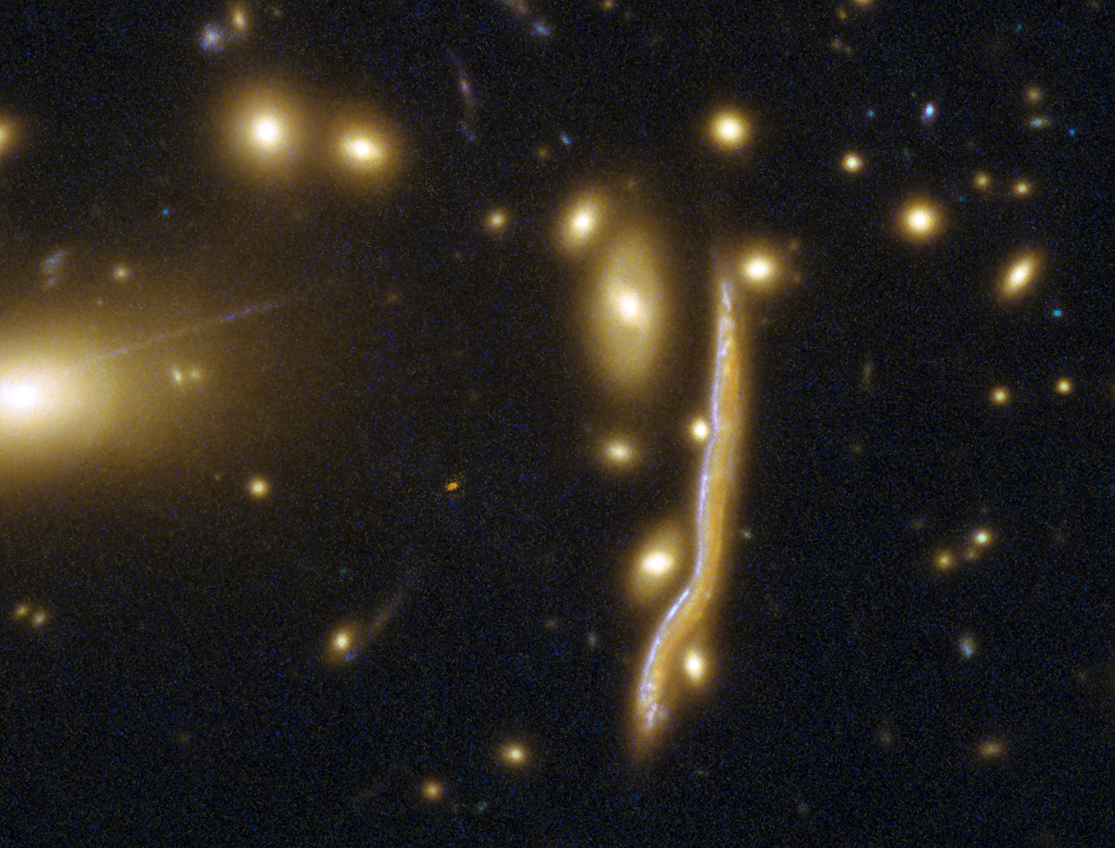

Cosmic snake pregnant with stars

This NASA/ESA Hubble Space Telescope image reveals the Cosmic Snake, a distant galaxy peppered with clumpy regions of intense star formation that appear warped by the effect of gravitational lensing. This giant arc-like galaxy is actually behind the huge galaxy cluster MACSJ1206.2-0847, but thanks to the cluster’s gravity, we can see it from Earth.

Light from the distant, high-redshift galaxy arrives at Earth, having been distorted by the gigantic gravitational influence of the intervening cluster. Fascinatingly, instead of making it more difficult to perceive cosmological objects, such strong lensing effects improve the resolution and depth of an image by magnifying the background object. Sometimes gravitational lensing can even produce multiple images of the object as light is bent in different directions around the foreground cluster.

Using Hubble, astronomers recently looked at several such images of the Cosmic Snake, each with a different level of magnification. Using this technique, the galaxy and its features could be studied on different scales. The highest-resolution images revealed that giant clumps in high-redshift galaxies are made up of a complex substructure of smaller clumps, which contributes to our understanding of star formation in distant galaxies.

Credit: ESA/Hubble, NASA